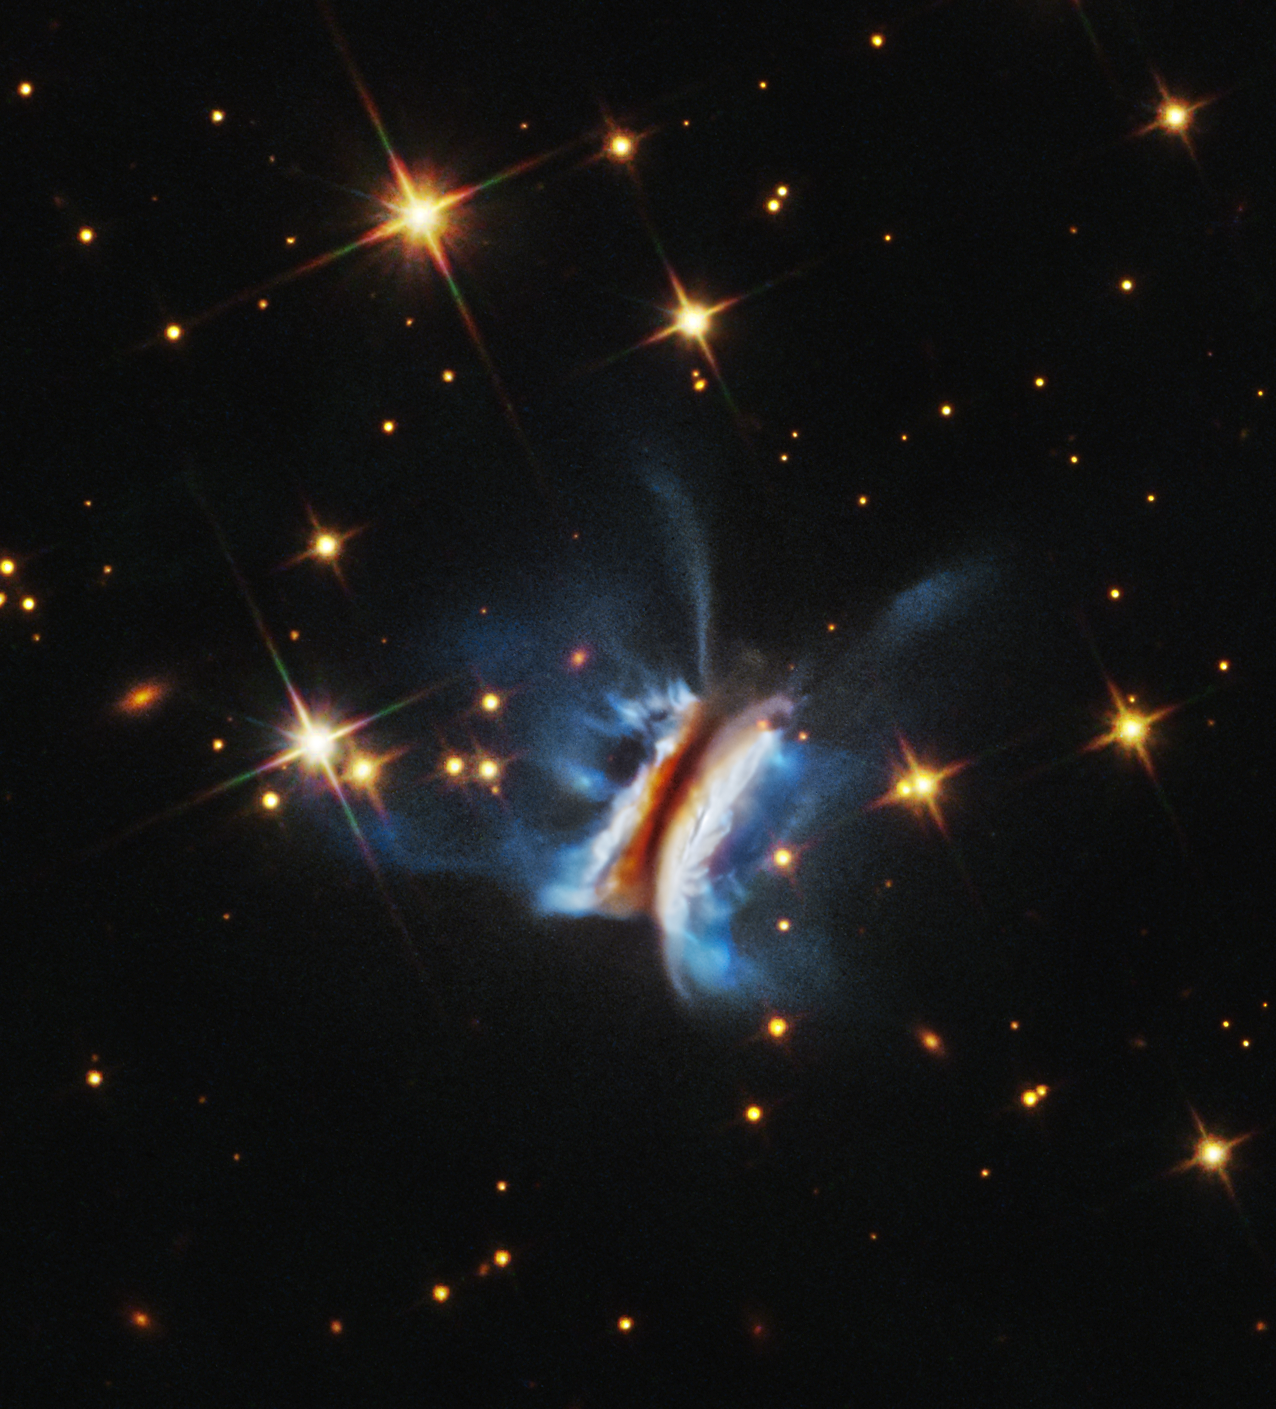

Circumstellar disc IRAS 23077+6707

This NASA/ESA Hubble Space Telescope image shows the largest planet-forming disc ever observed around a young star. It spans nearly 640 billion kilometers, roughly 40 times the diameter of our Solar System. Tilted nearly edge-on as seen from Earth, the dark, dusty disk resembles a hamburger. Hubble reveals it to be unusually chaotic, with bright wisps of material extending far above and below the disk—more than seen in any similar circumstellar disk. Cataloged as IRAS 23077+6707, the system is located approximately 1,000 light-years from Earth. The discovery marks a new milestone for Hubble and offers fresh insight into planet formation in extreme environments across the galaxy.

Credit: NASA, ESA, STScI, K. Monsch (CfA). Image processing: J. DePasquale (STScI).